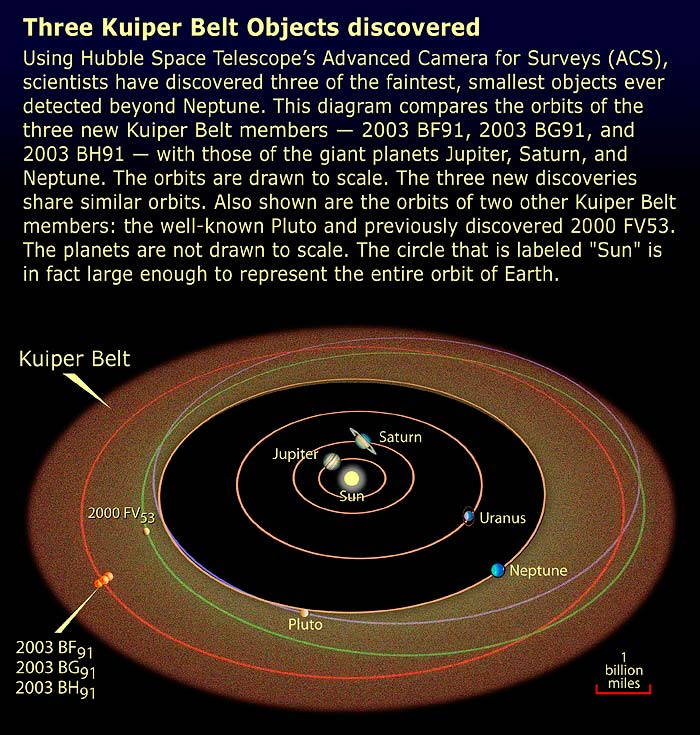

KBO orbits diagram

Three Kuiper Belt Objects, discovered beyond the orbit of Neptune by Hubble Space Telescope.

Credit: NASA/ESA and A. Feild (STScI)